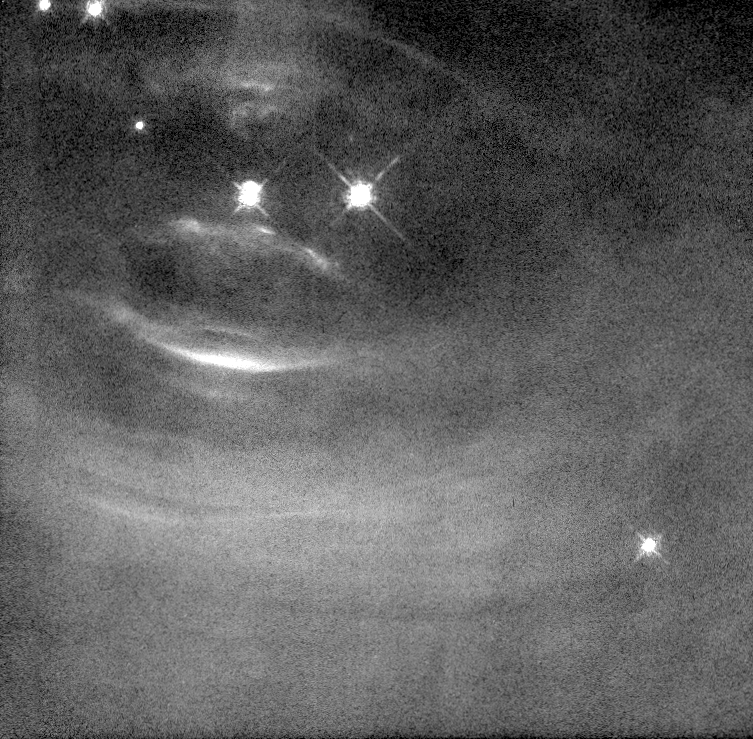

Changes in the Inner Crab Pulsar

Scientists are learning more about how pulsars work by studying a series of Hubble Space Telescope images of the heart of the Crab Nebula. The images, taken over a period of several months, show that the Crab is a far more dynamic object than previously understood.

Credit: Jeff Hester and Paul Scowen (Arizona State University), and NASA/ESA